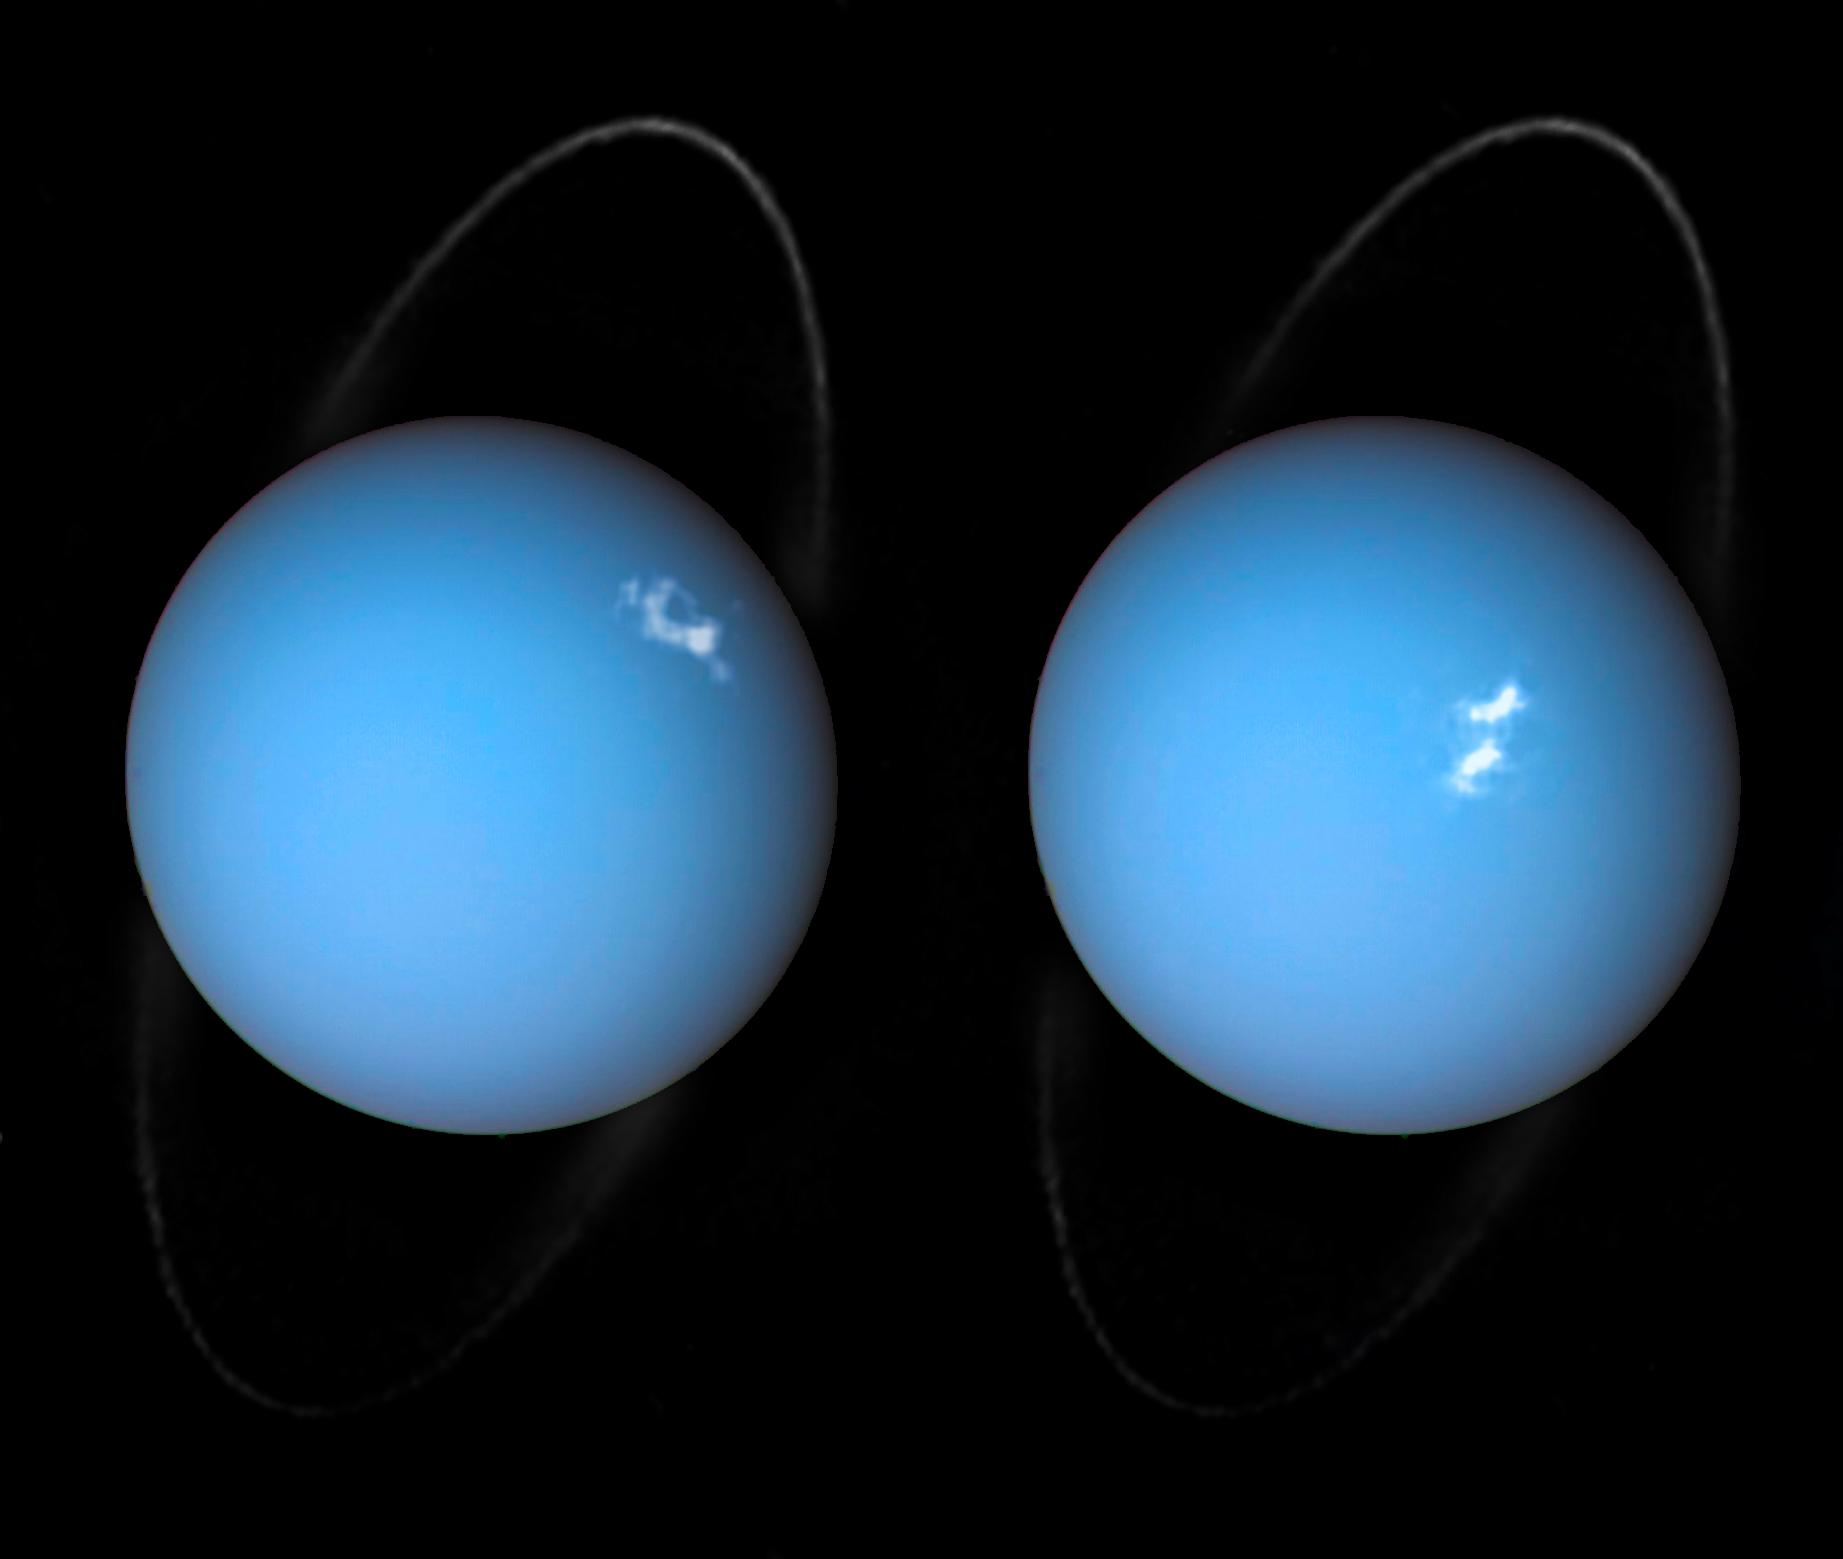

Alien aurorae on Uranus

Ever since Voyager 2 beamed home spectacular images of the planets in the 1980s, planet-lovers have been hooked on extra-terrestrial aurorae. Aurorae are caused by streams of charged particles like electrons, that come from various origins such as solar winds, the planetary ionosphere, and moon volcanism. They become caught in powerful magnetic fields and are channelled into the upper atmosphere, where their interactions with gas particles, such as oxygen or nitrogen, set off spectacular bursts of light.

The alien aurorae on Jupiter and Saturn are well-studied, but not much is known about the aurorae of the giant ice planet Uranus. In 2011, the NASA/ESA Hubble Space Telescope became the first Earth-based telescope to snap an image of the aurorae on Uranus. In 2012 and 2014 a team led by an astronomer from Paris Observatory took a second look at the aurorae using the ultraviolet capabilities of the Space Telescope Imaging Spectrograph (STIS) installed on Hubble.

They tracked the interplanetary shocks caused by two powerful bursts of solar wind travelling from the Sun to Uranus, then used Hubble to capture their effect on Uranus’ aurorae — and found themselves observing the most intense aurorae ever seen on the planet. By watching the aurorae over time, they collected the first direct evidence that these powerful shimmering regions rotate with the planet. They also re-discovered Uranus’ long-lost magnetic poles, which were lost shortly after their discovery by Voyager 2 in 1986 due to uncertainties in measurements and the featureless planet surface.

This is a composite image of Uranus by Voyager 2 and two different observations made by Hubble — one for the ring and one for the aurorae.

Credit: ESA/Hubble & NASA, L. Lamy / Observatoire de Paris